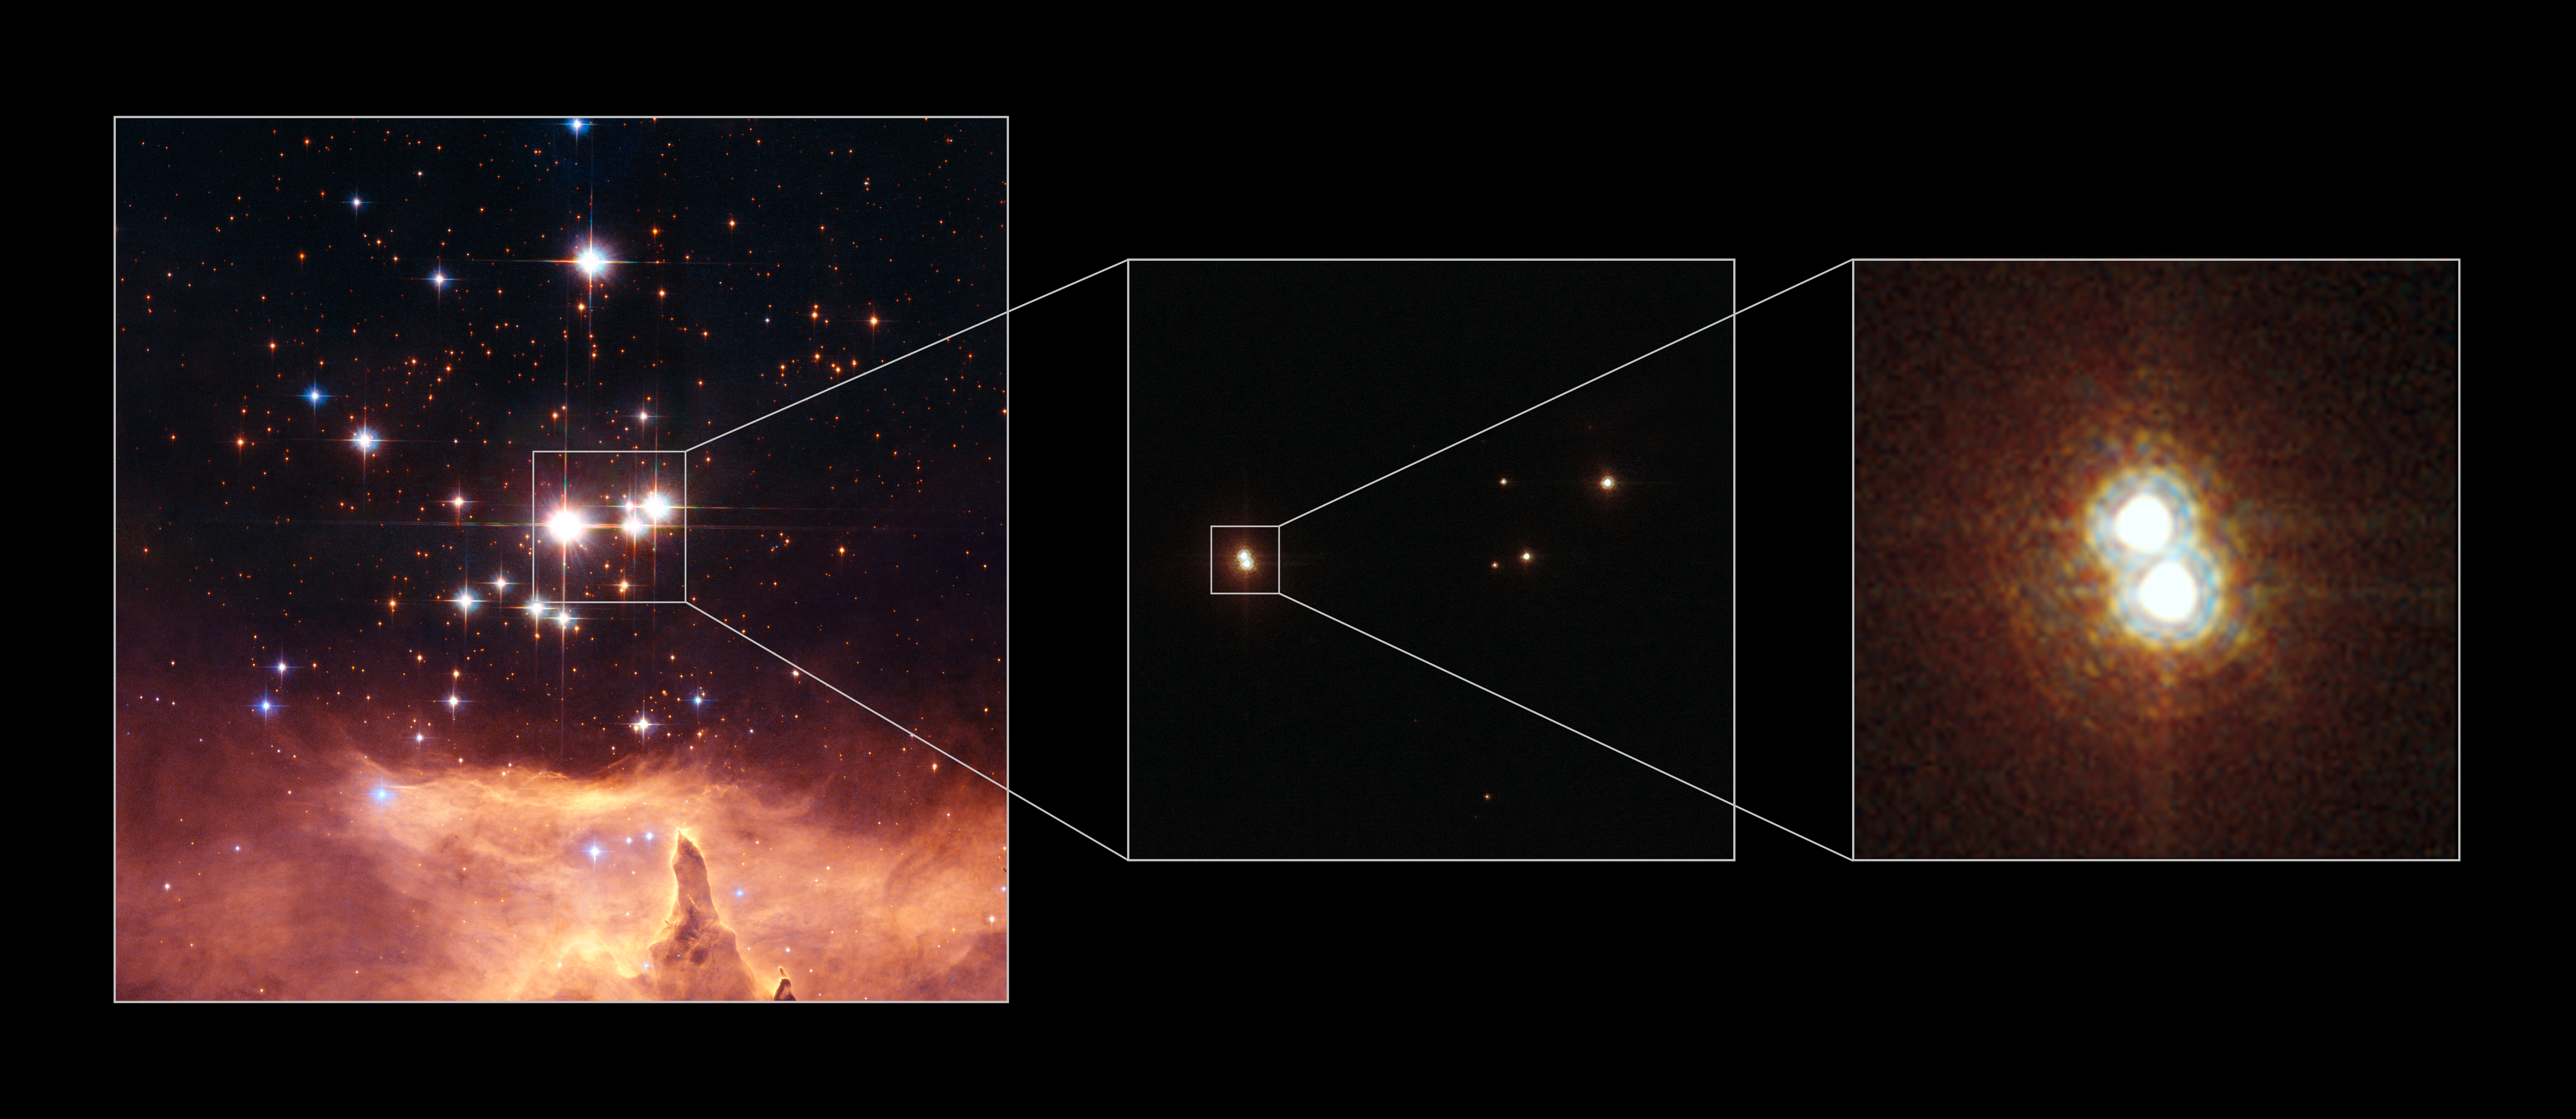

Star on a Hubble diet

Left: ACS WFC image of NGC 6357 with Pismis 24-1 in the centre (the brightest star). Middle: Looking closer at Pismis 24-1 with Hubble's ACS High Resolution Channel it becomes clear that it is in reality two stars.Right: ACS HRC image close-up showing the two stars of Pismis 24-1. It was thought to have an incredibly large mass of 200 to 300 solar masses. New NASA/ESA Hubble measurements of the star, have, however, resolved Pismis 24-1 into two separate stars, and, in doing so, have "halved" its mass to around 100 solar masses.

Credit: NASA, ESA and Jesœs Maíz Apellÿniz (Instituto de astrofísica de Andalucía, Spain). Acknowledgement: Davide De Martin (ESA/Hubble)